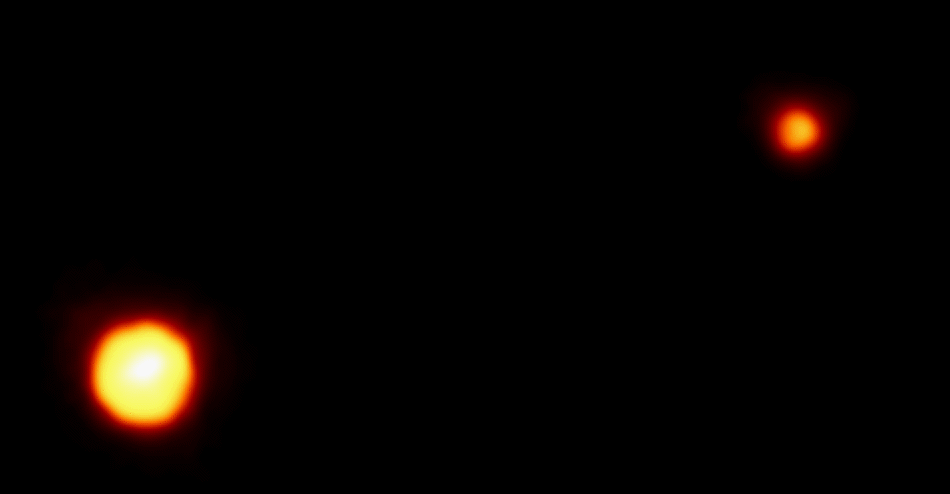

Pluto and Charon

This is the clearest view yet of the distant planet Pluto and its moon, Charon, as revealed by the Hubble Space Telescope (HST). The image was taken by the European Space Agency's Faint Object Camera (FOC) on February 21, 1994 when the planet was 2.6 billion miles (4.4 billion kilometers) from Earth; or nearly 30 times the separation between Earth and the sun.

Credit: Dr. R. Albrecht, ESA/ESO Space Telescope European Coordinating Facility; NASA